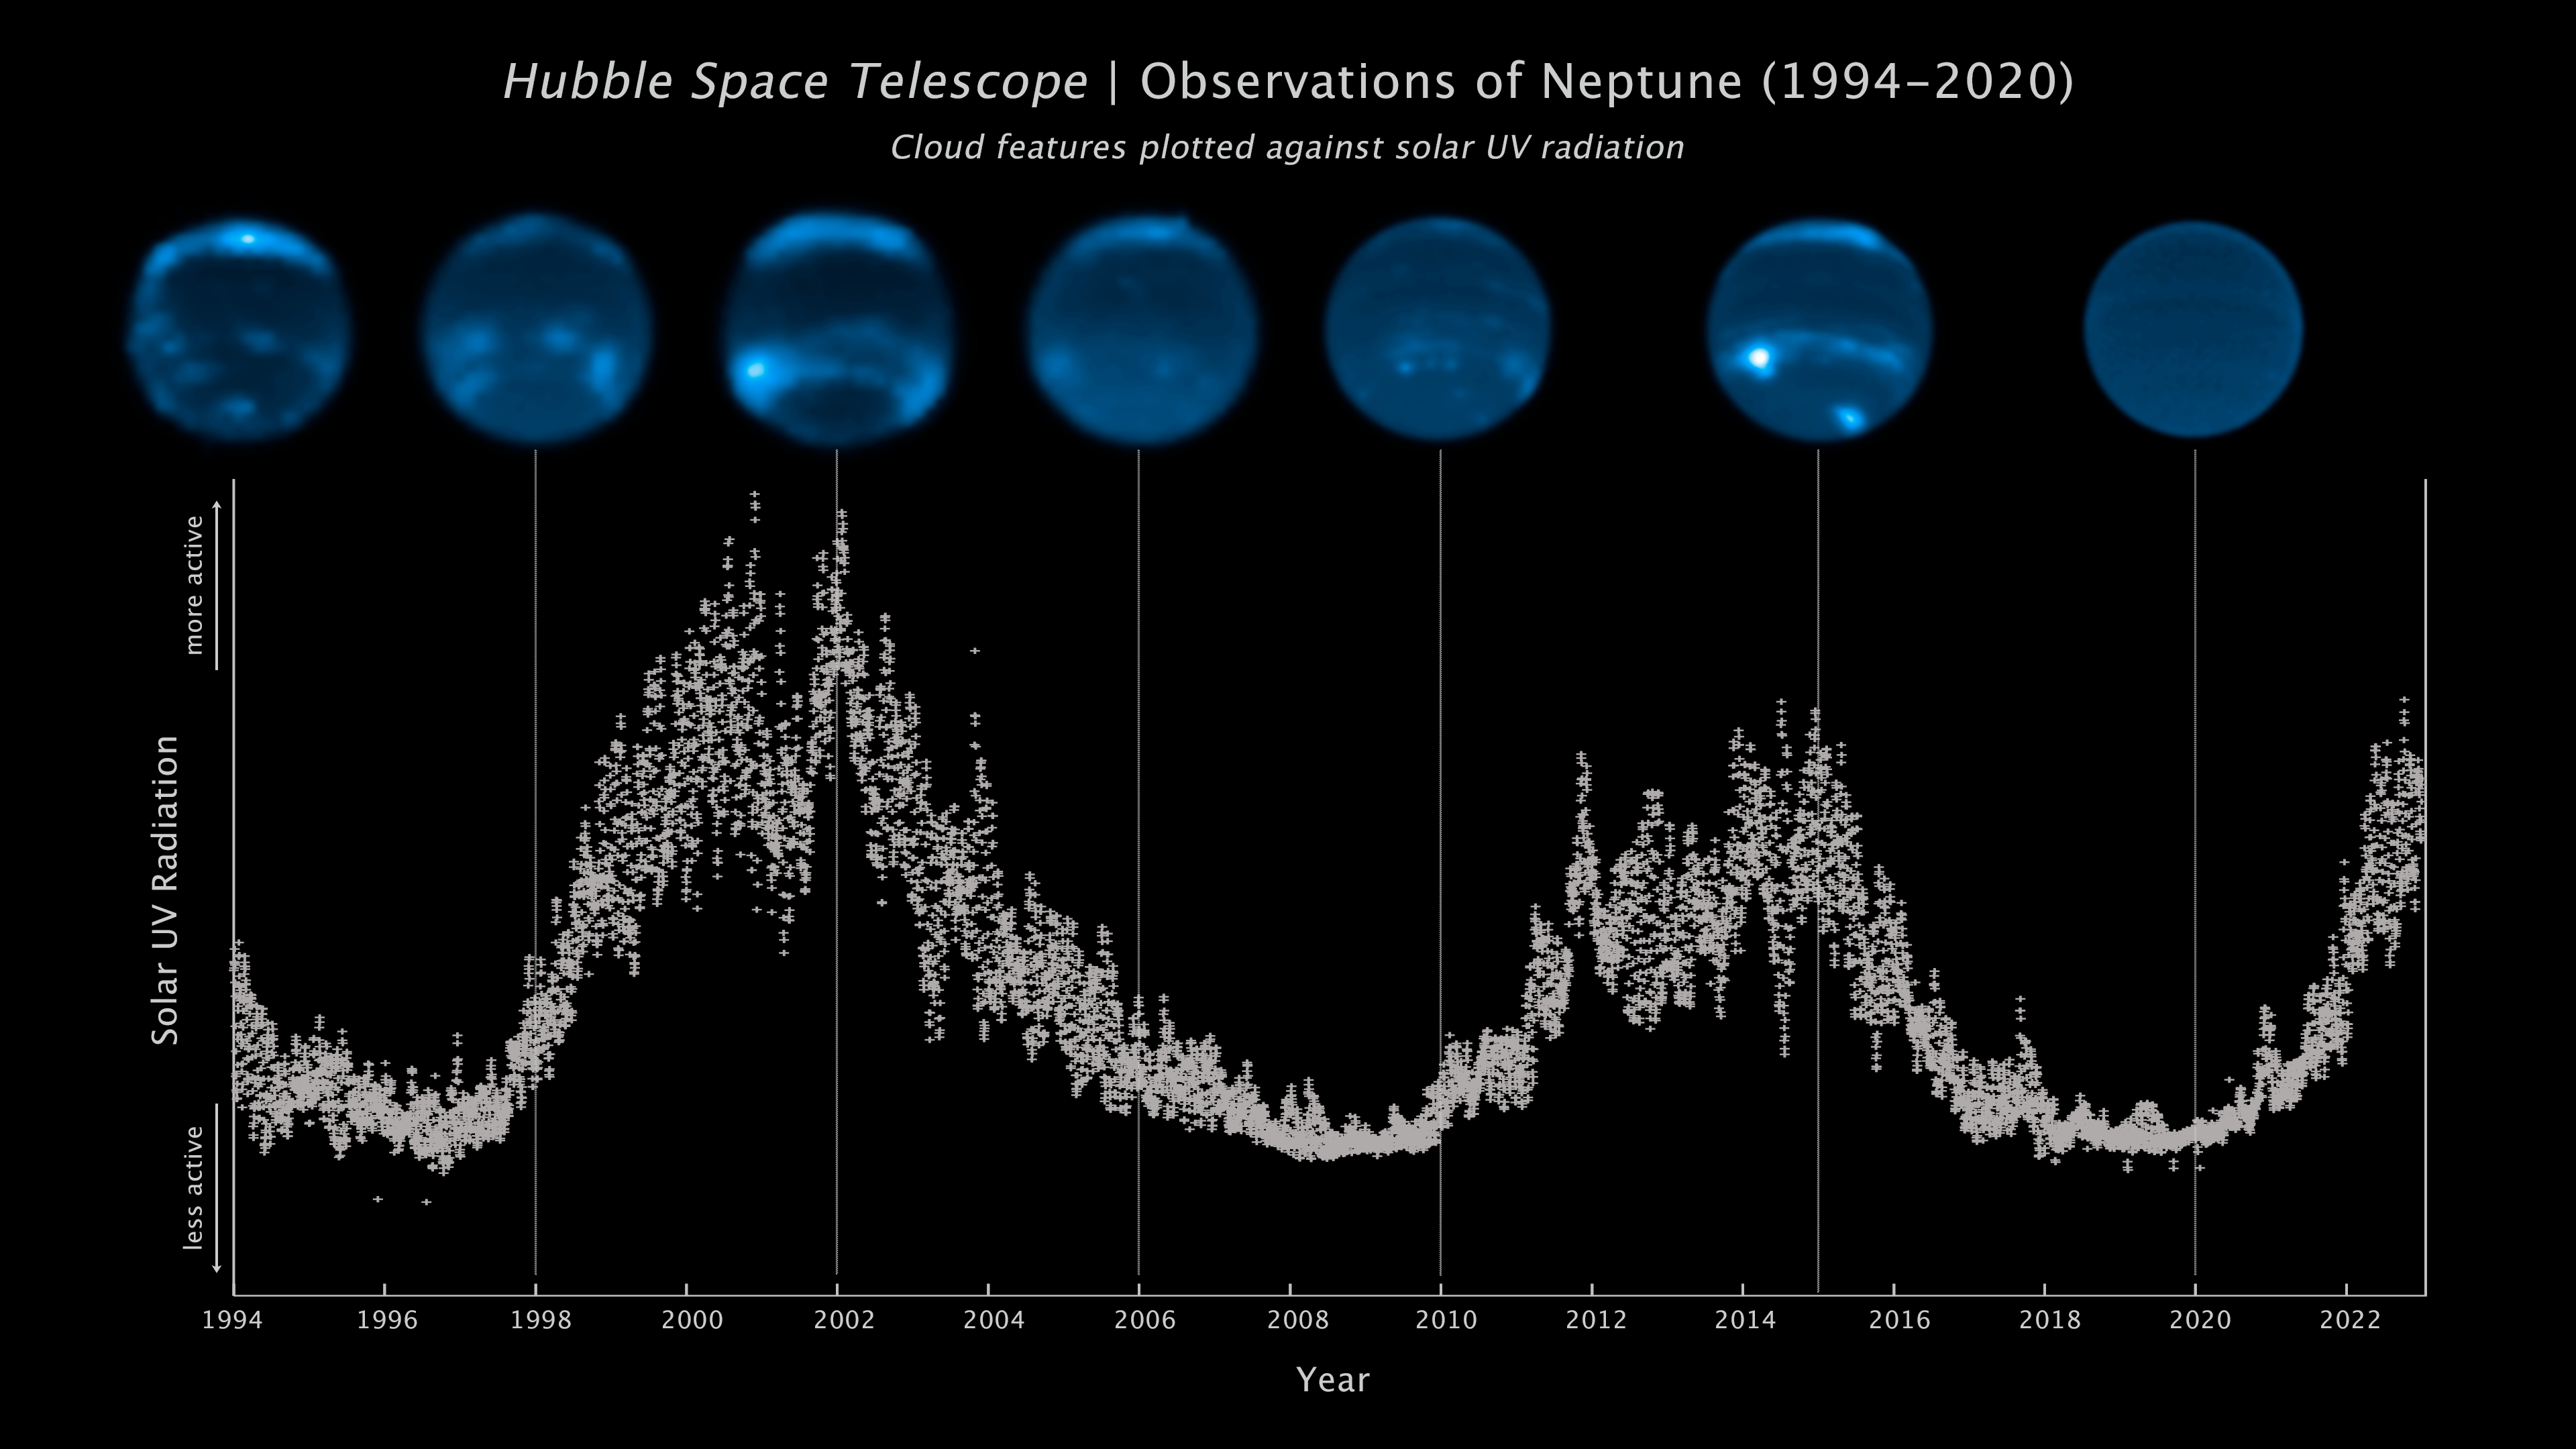

Neptune cloud cover over three decades

This sequence of NASA/ESA Hubble Space Telescope images chronicles the waxing and waning of the amount of cloud cover on Neptune. This nearly-30-year-long set of observations shows that the number of clouds grows increasingly following a peak in the solar cycle – where the Sun’s level of activity rhythmically rises and falls over an 11-year period.

The Sun’s level of ultraviolet radiation is plotted in the vertical axis. The 11-year cycle is plotted along the bottom from 1994 to 2022. The Hubble observations along the top, clearly show a correlation between cloud abundance and solar peak of activity.

The theory is that the increased ultraviolet radiation from the Sun, during its peak of activity, causes chemical changes deep in Neptune’s atmosphere. After a couple years this eventually percolates into the upper atmosphere to form clouds.

The findings are published in the journal Icarus.

Credit: NASA, ESA, E. Chavez (UC Berkeley), I. de Pater (UC Berkeley), LASP Interactive Solar IRadiance Datacenter